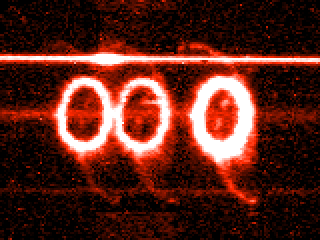

First hint of knot STIS H-alpha

This image from the Hubble's Space Telescope Imaging Spectrograph (STIS) shows a new and unprecedented look at the light-year wide ring of glowing gas around supernova 1987A, the nearest stellar explosion in 400 years, which occurred in February 1987.

Credit: George Sonneborn and Jason Pun (NASA/ESA/Goddard Space Flight Center)